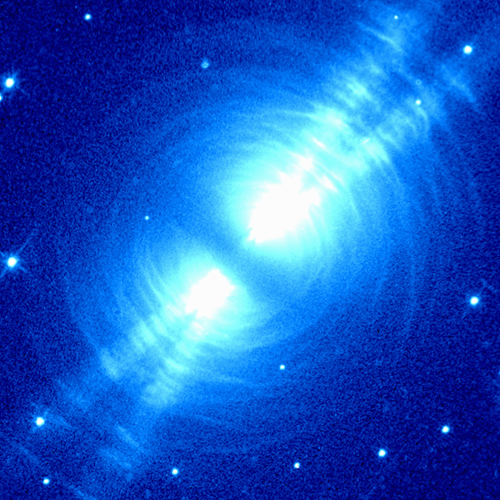

NICMOS Peers Into Heart of Dying Star

The Egg Nebula, also known as CRL 2688, is shown as it appears in visible light with the Hubble Space Telescope's Wide Field and Planetary Camera 2(WFPC2).

Credit: Rodger Thompson, Marcia Rieke, Glenn Schneider, Dean Hines (Universityof Arizona); Raghvendra Sahai (Jet Propulsion Laboratory); NICMOS Instrument Definition Team; and NASA/ESA